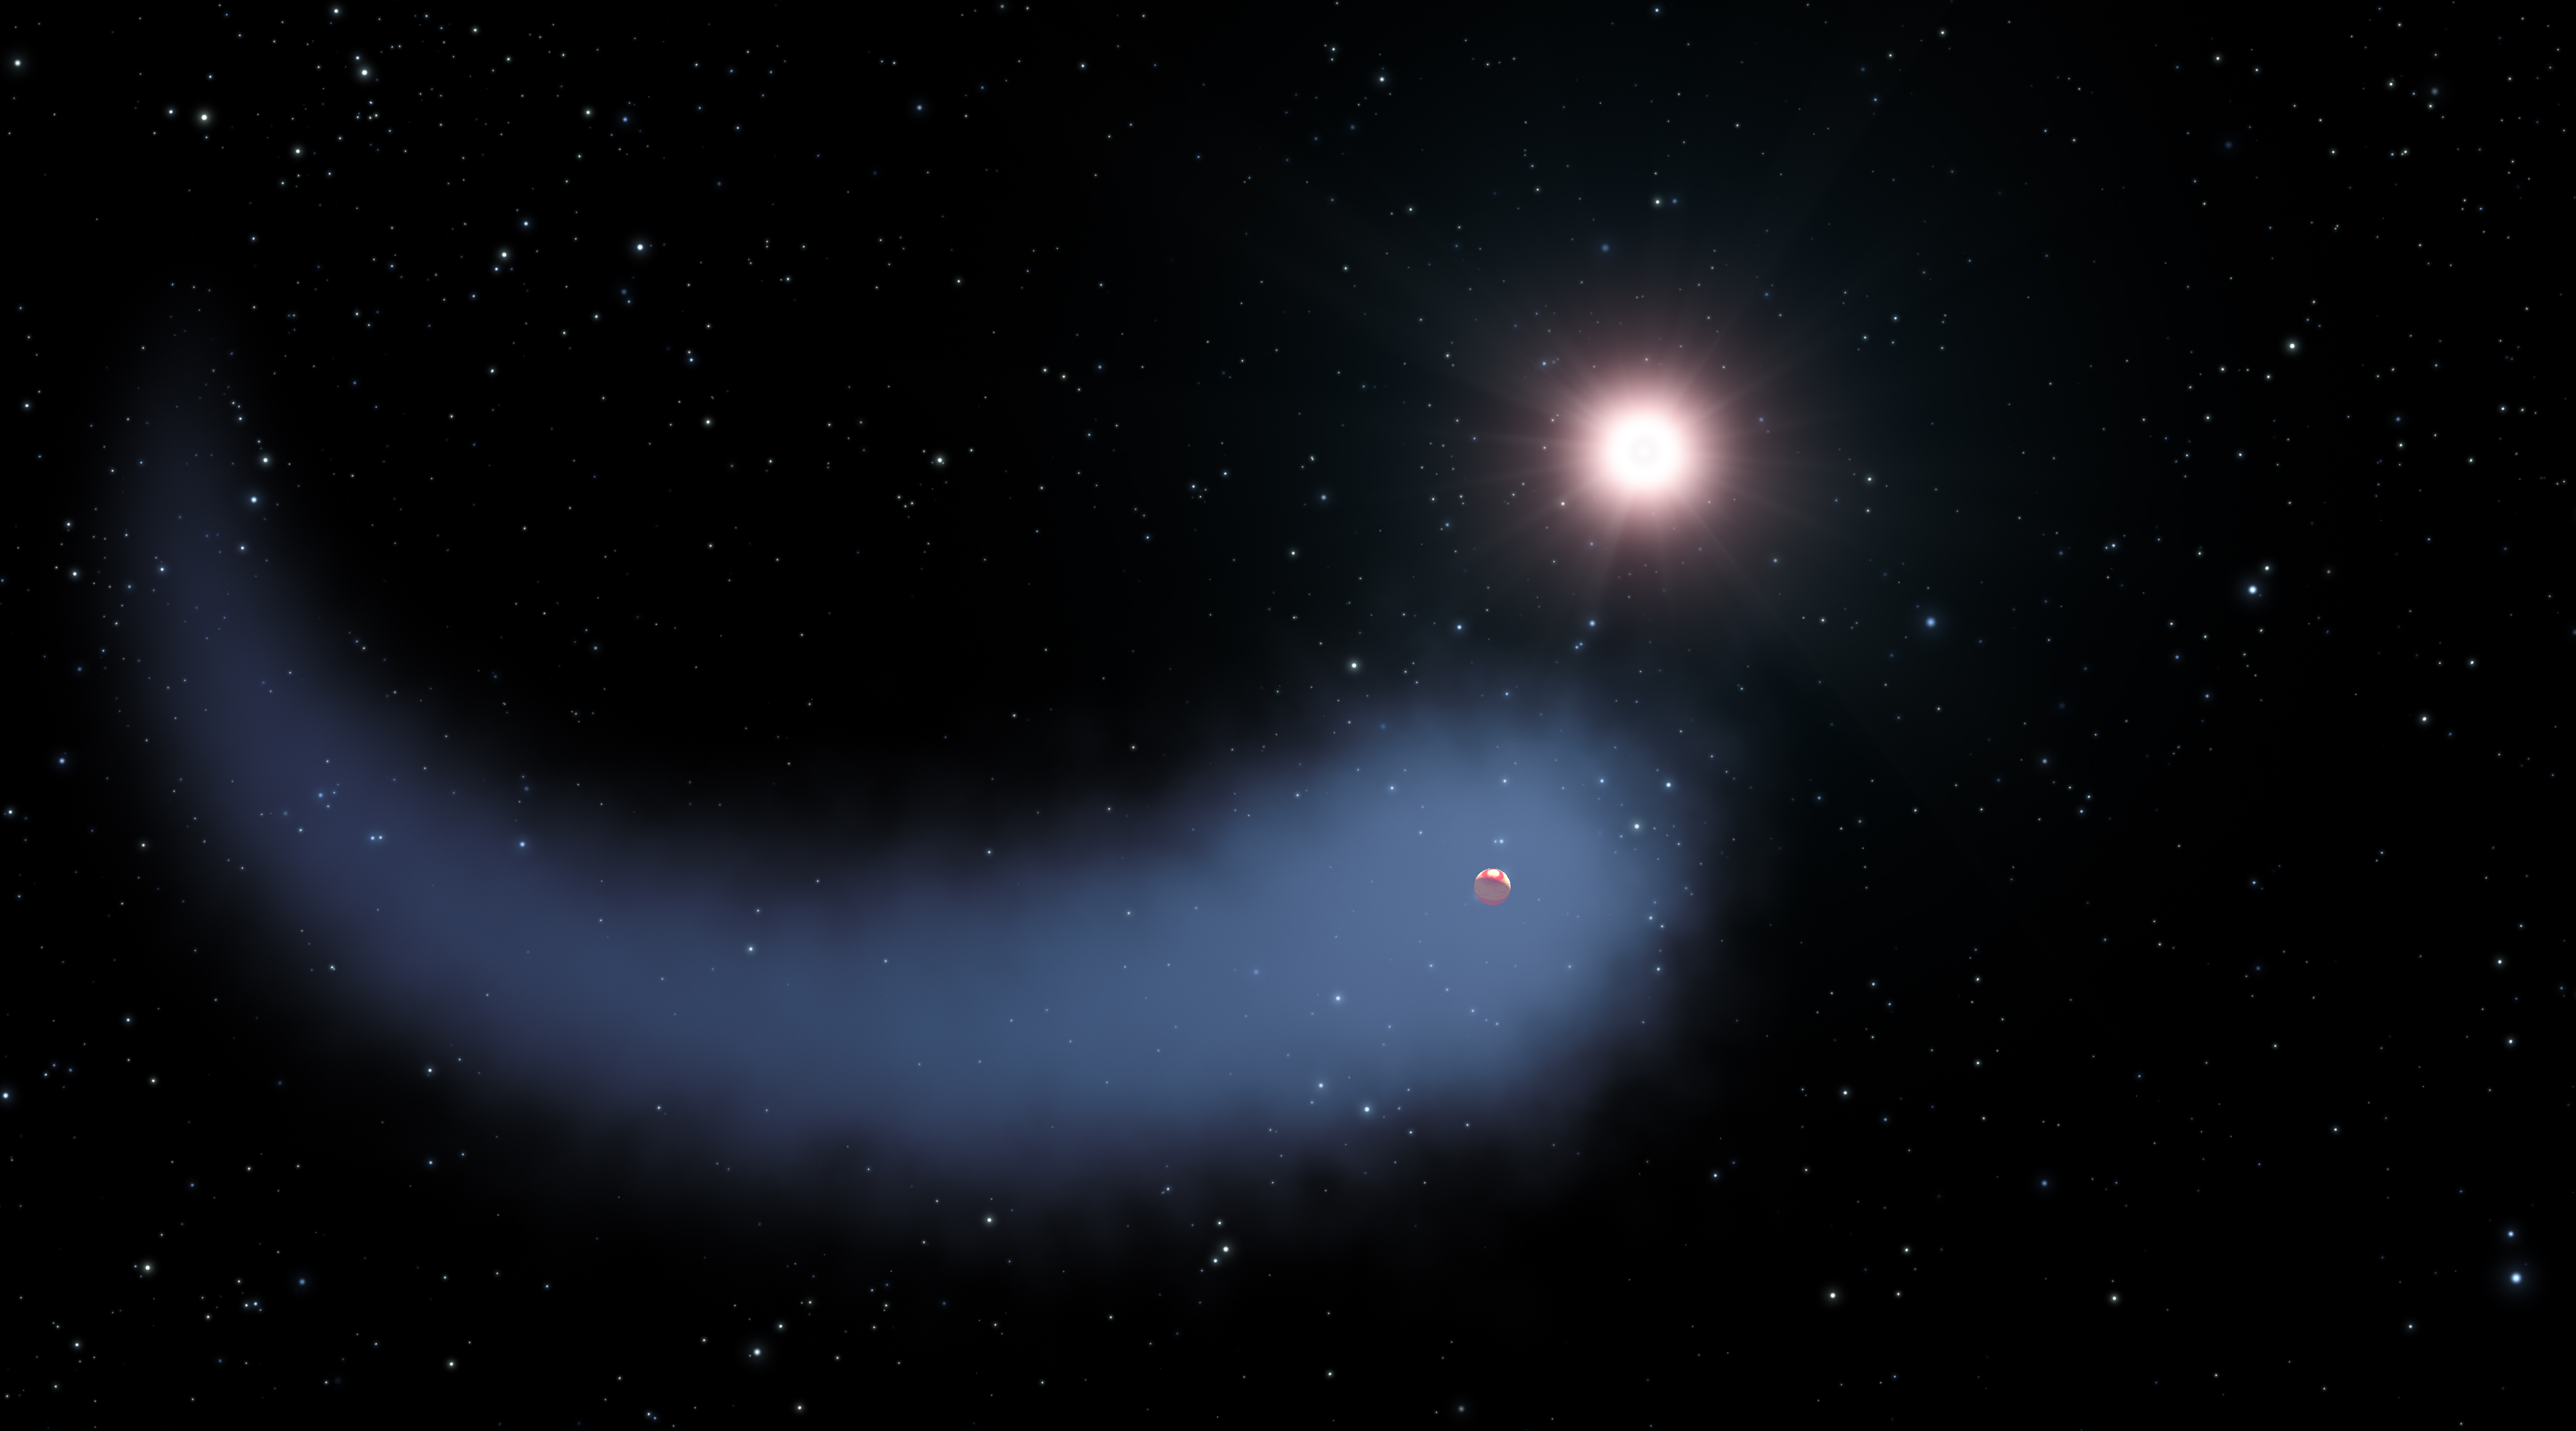

Artist impression of Gliese 436b

This artist's concept shows the enormous comet-like cloud of hydrogen bleeding off of the warm, Neptune-sized planet Gliese 436b just 30 light-years from Earth. Also depicted is the parent star, which is a faint red dwarf named Gliese 436. The hydrogen is evaporating from the planet due to extreme radiation from the star. A phenomenon this large has never before been seen around any exoplanet.

Credit: NASA, ESA, STScI, and G. Bacon